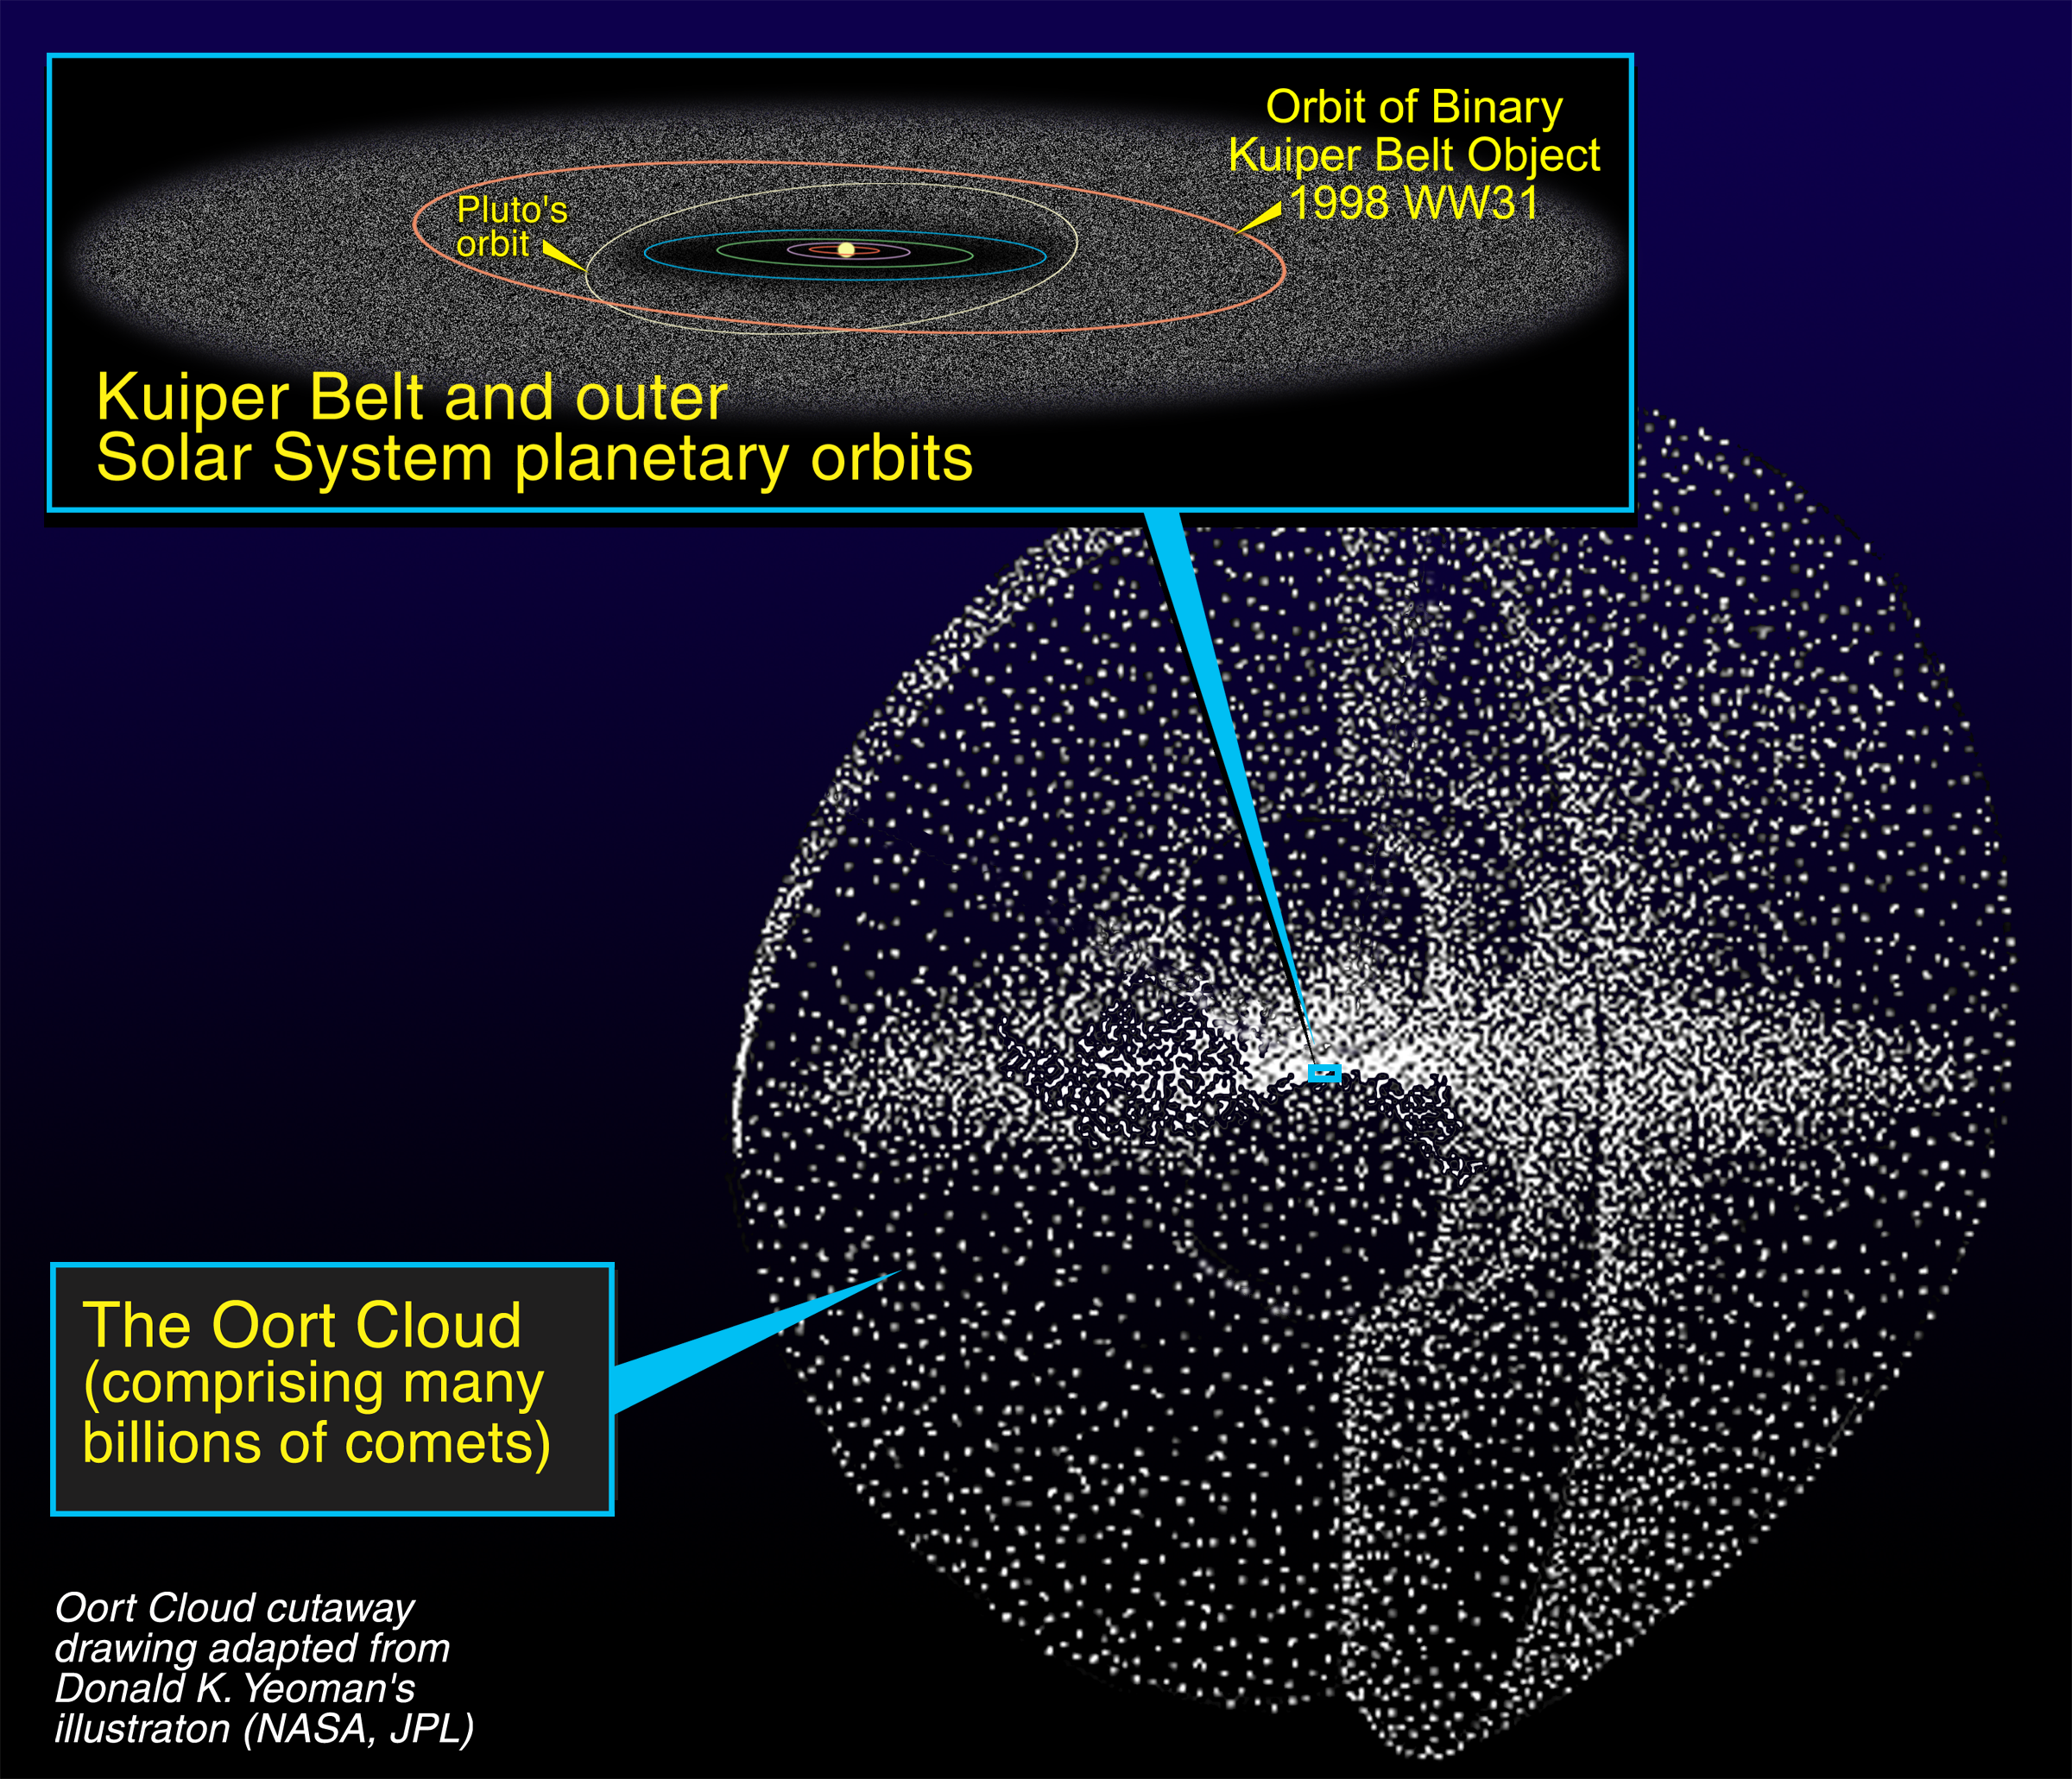

Relationship of the Kuiper Belt to the Oort Cloud

This illustration shows that the Kuiper Belt is shaped like a disk [see inset diagram] and resides within the shell-like structure of the Oort Cloud. Located on the outskirts of the solar system, the Kuiper Belt is a "junkyard" of countless icy bodies left over from the solar system's formation. The Oort Cloud is a vast shell of billions of comets. The inset diagram compares Pluto's orbit with a Kuiper Belt binary object called 1998 WW31. The Kuiper Belt [the fuzzy disk] extends from inside Pluto's orbit to the edge of the solar system.

Credit: NASA/ESA and A. Feild (Space Telescope Science Institute)